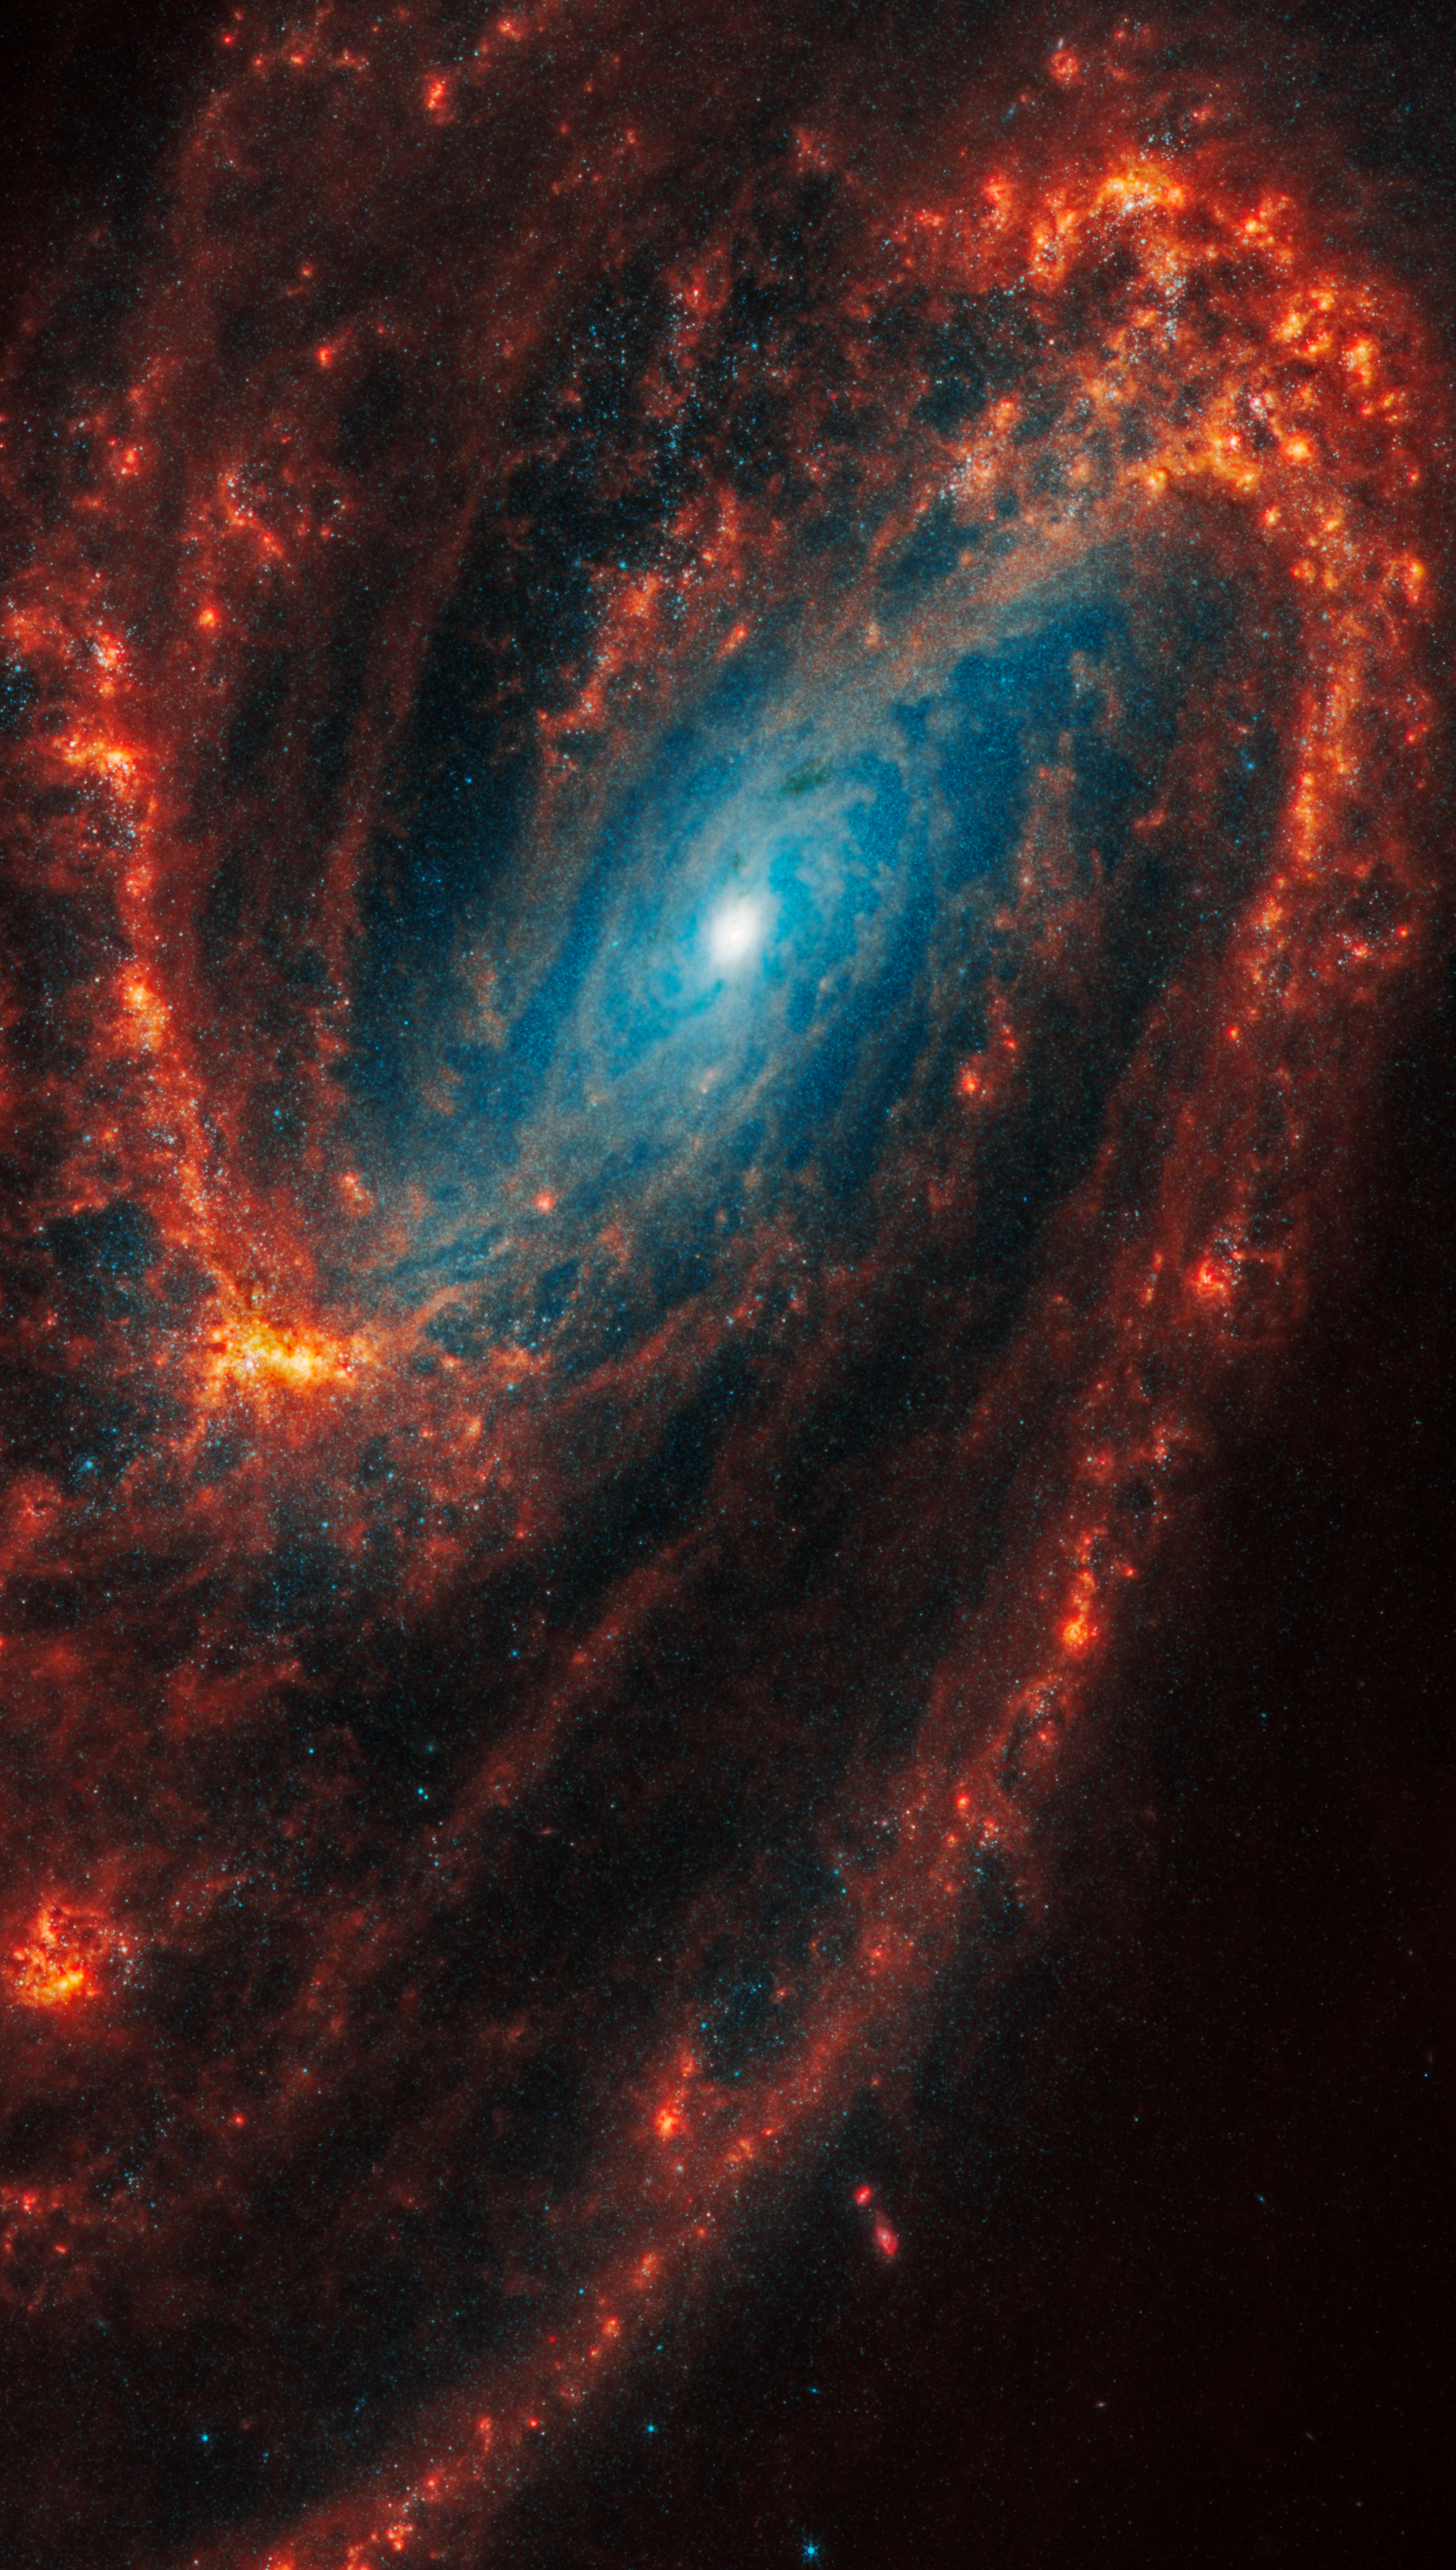

NGC 3627

This spiral galaxy was observed as part of the Physics at High Angular resolution in Nearby GalaxieS (PHANGS) program, a large project that includes observations from several space- and ground-based telescopes of many galaxies to help researchers study all phases of the star formation cycle, from the formation of stars within dusty gas clouds to the energy released in the process that creates the intricate structures revealed by Webb’s new images.

NGC 3627 is 36 million light-years away in the constellation Leo.

Learn more about what can be seen in this vast collection of Webb images here.

Credit: NASA, ESA, CSA, STScI, J. Lee (STScI), T. Williams (Oxford), PHANGS Team